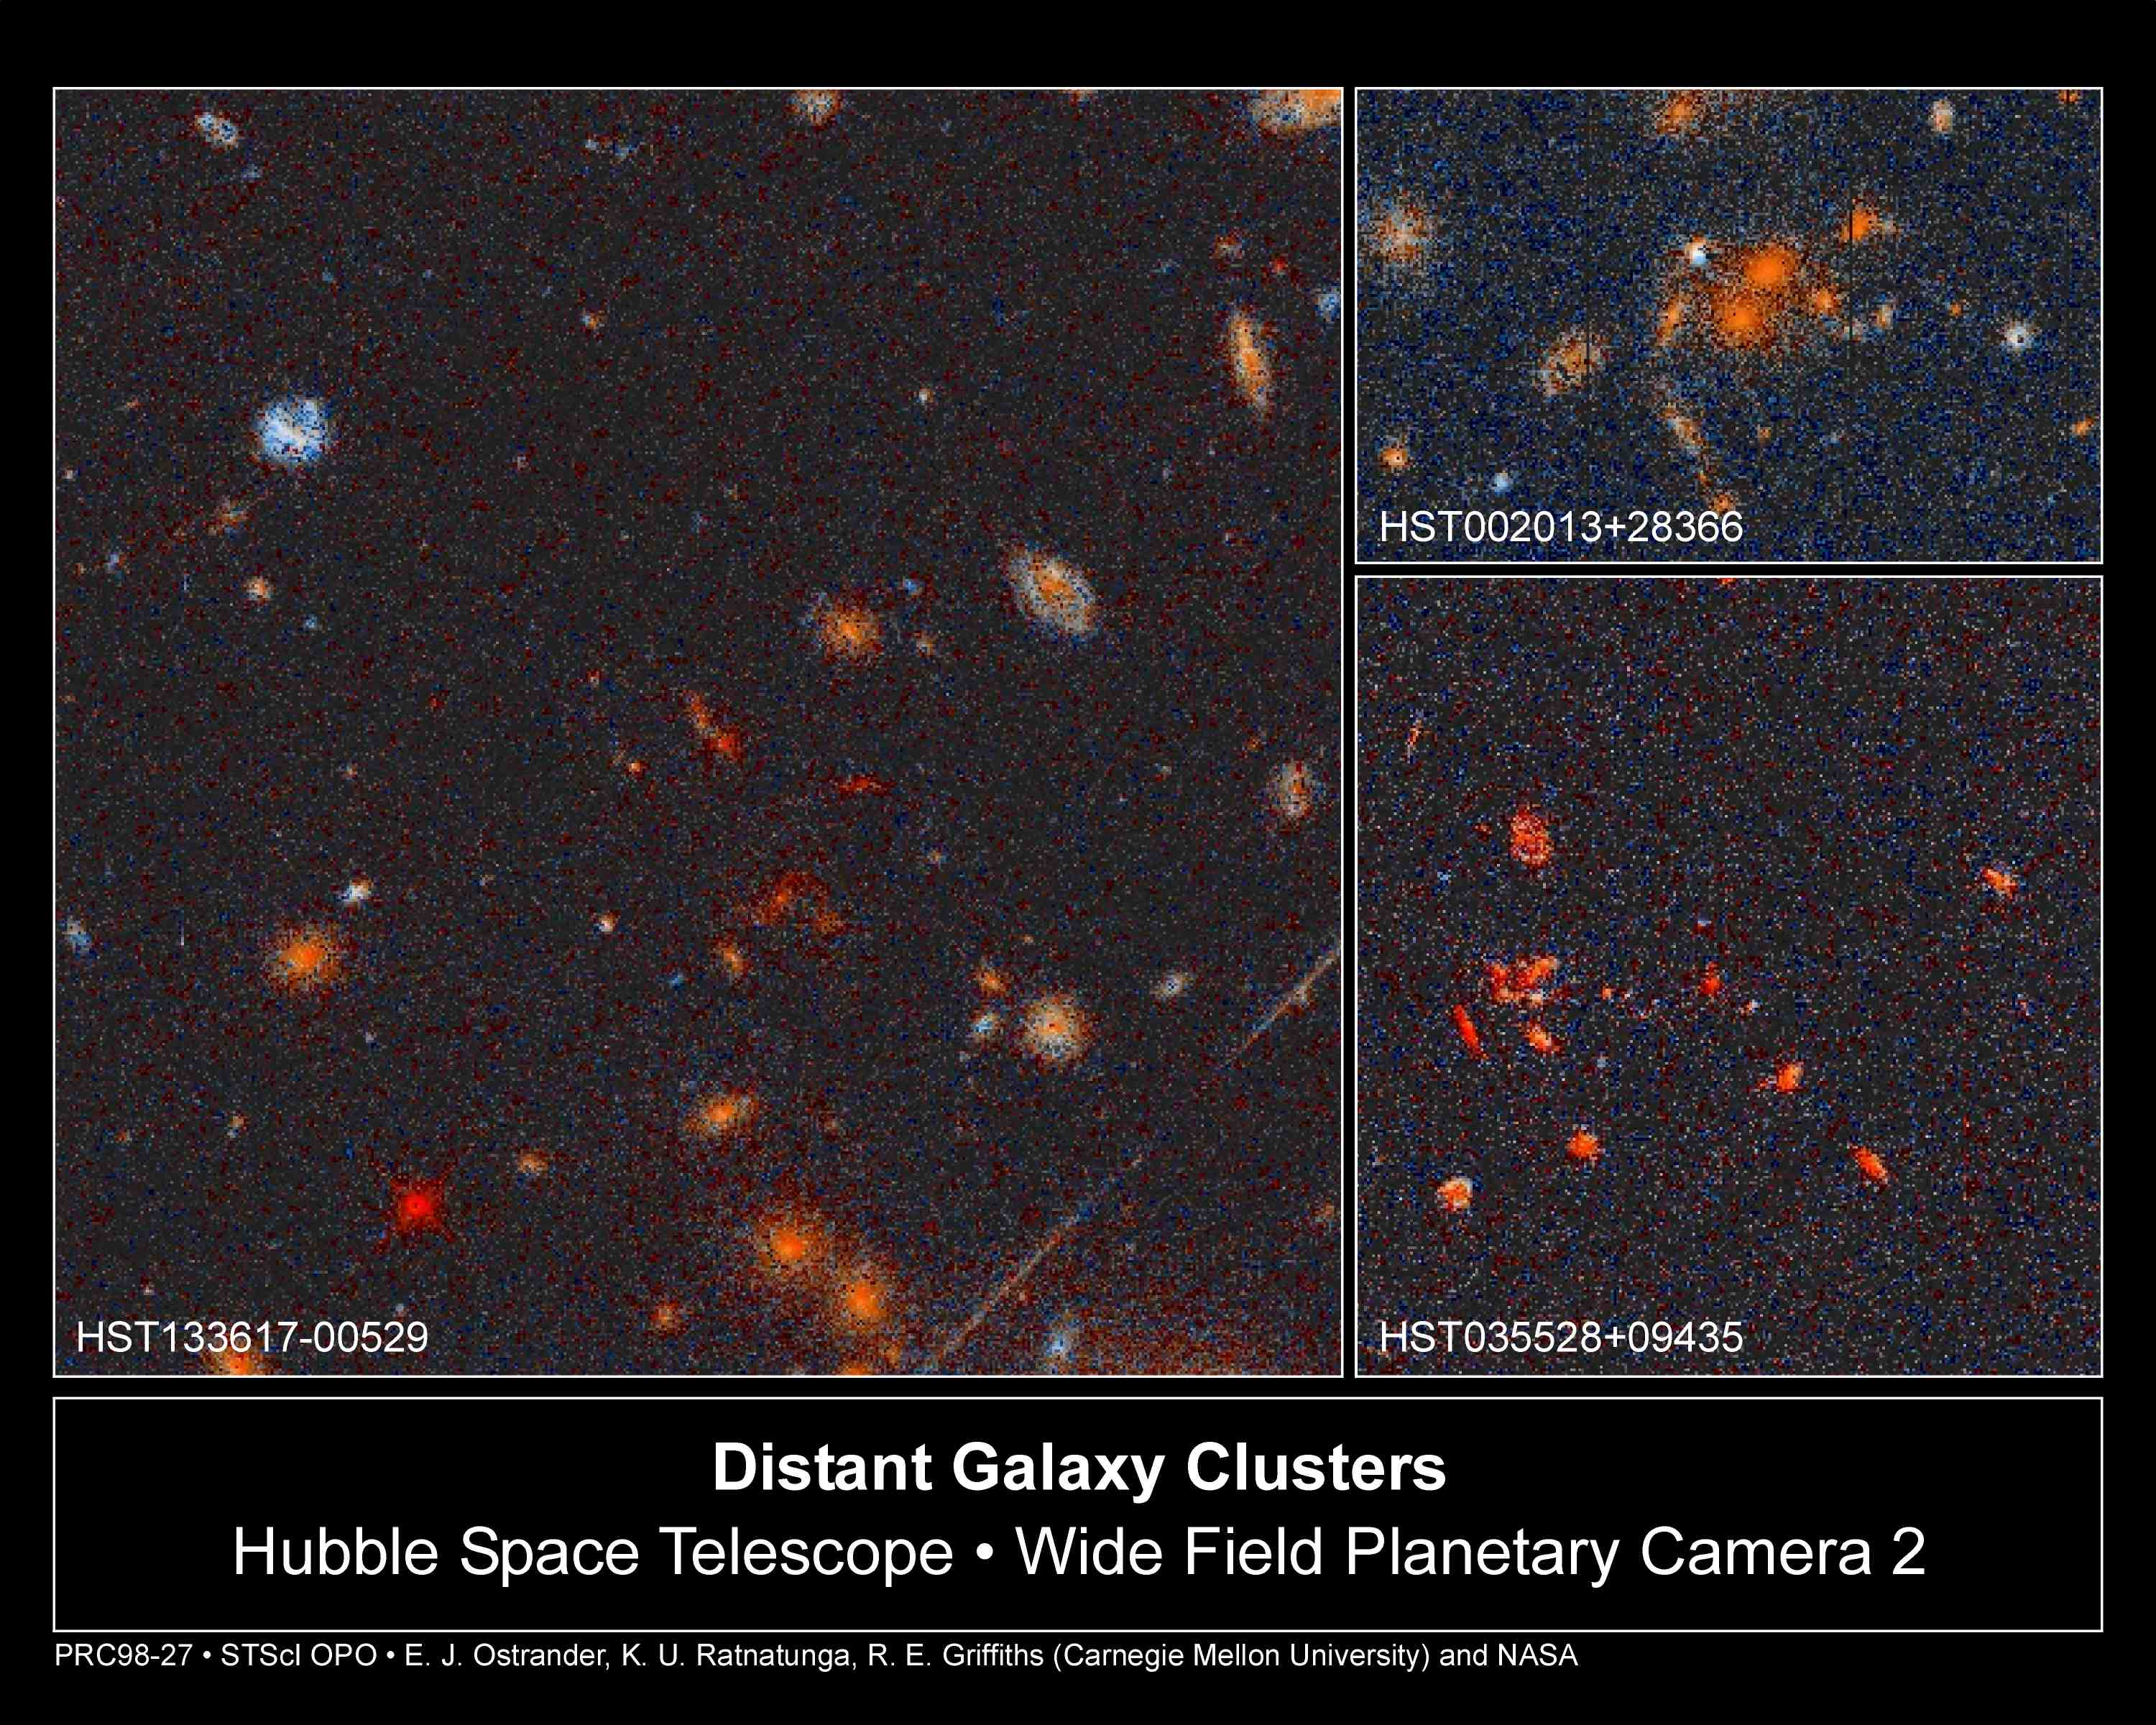

Distant Galaxy Clusters

A selection of NASA/ESA Hubble Space Telescope snapshots of huge galaxy clusters that lie far away and far back in time. These are selected from a catalog of 92 new clusters uncovered during a six-year Hubble observing program known as the Medium Deep Survey.

Credit: K. Ratnatunga, R. Griffiths (Carnegie Mellon University); and NASA/ESA